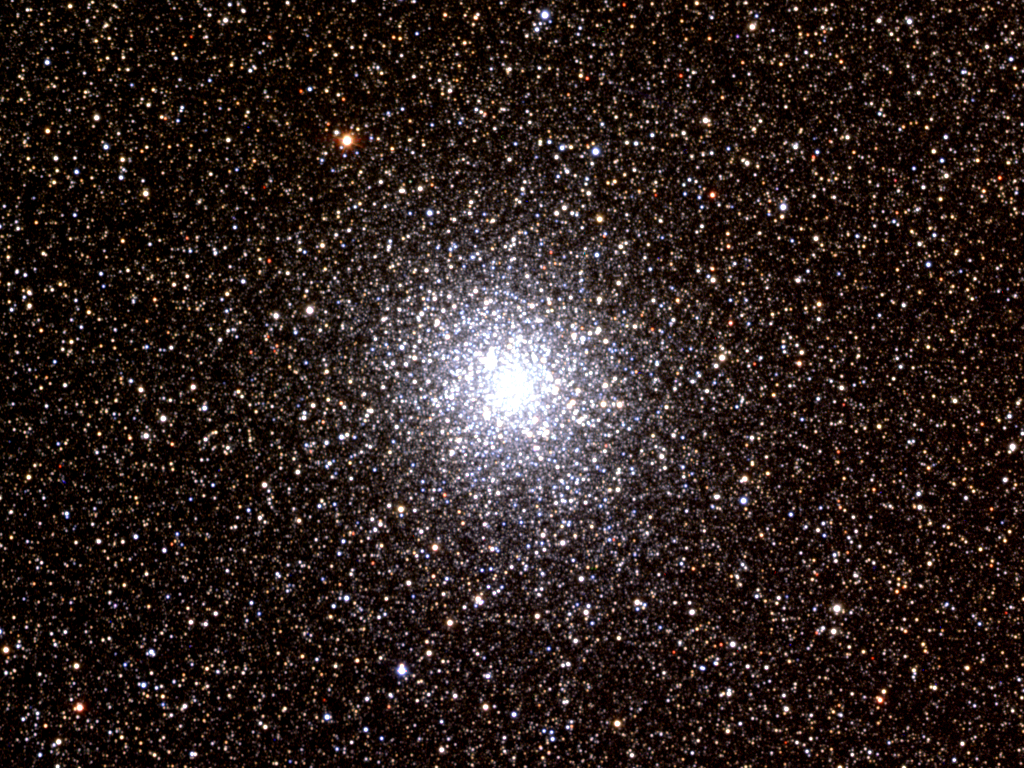

Hint of planet-sized drifters bewilders Hubble scientists (ground-based view)

This is a ground-based view of the globular cluster M22 made from CCD images taken in June 1995 at the Burrell Schmidt telescope of the Warner and Swasey Observatory of the Case Western Reserve University, located on Kitt Peak in Southwestern Arizona, USA.

Credit: N.A.Sharp, REU program/AURA/NOAO/NSF